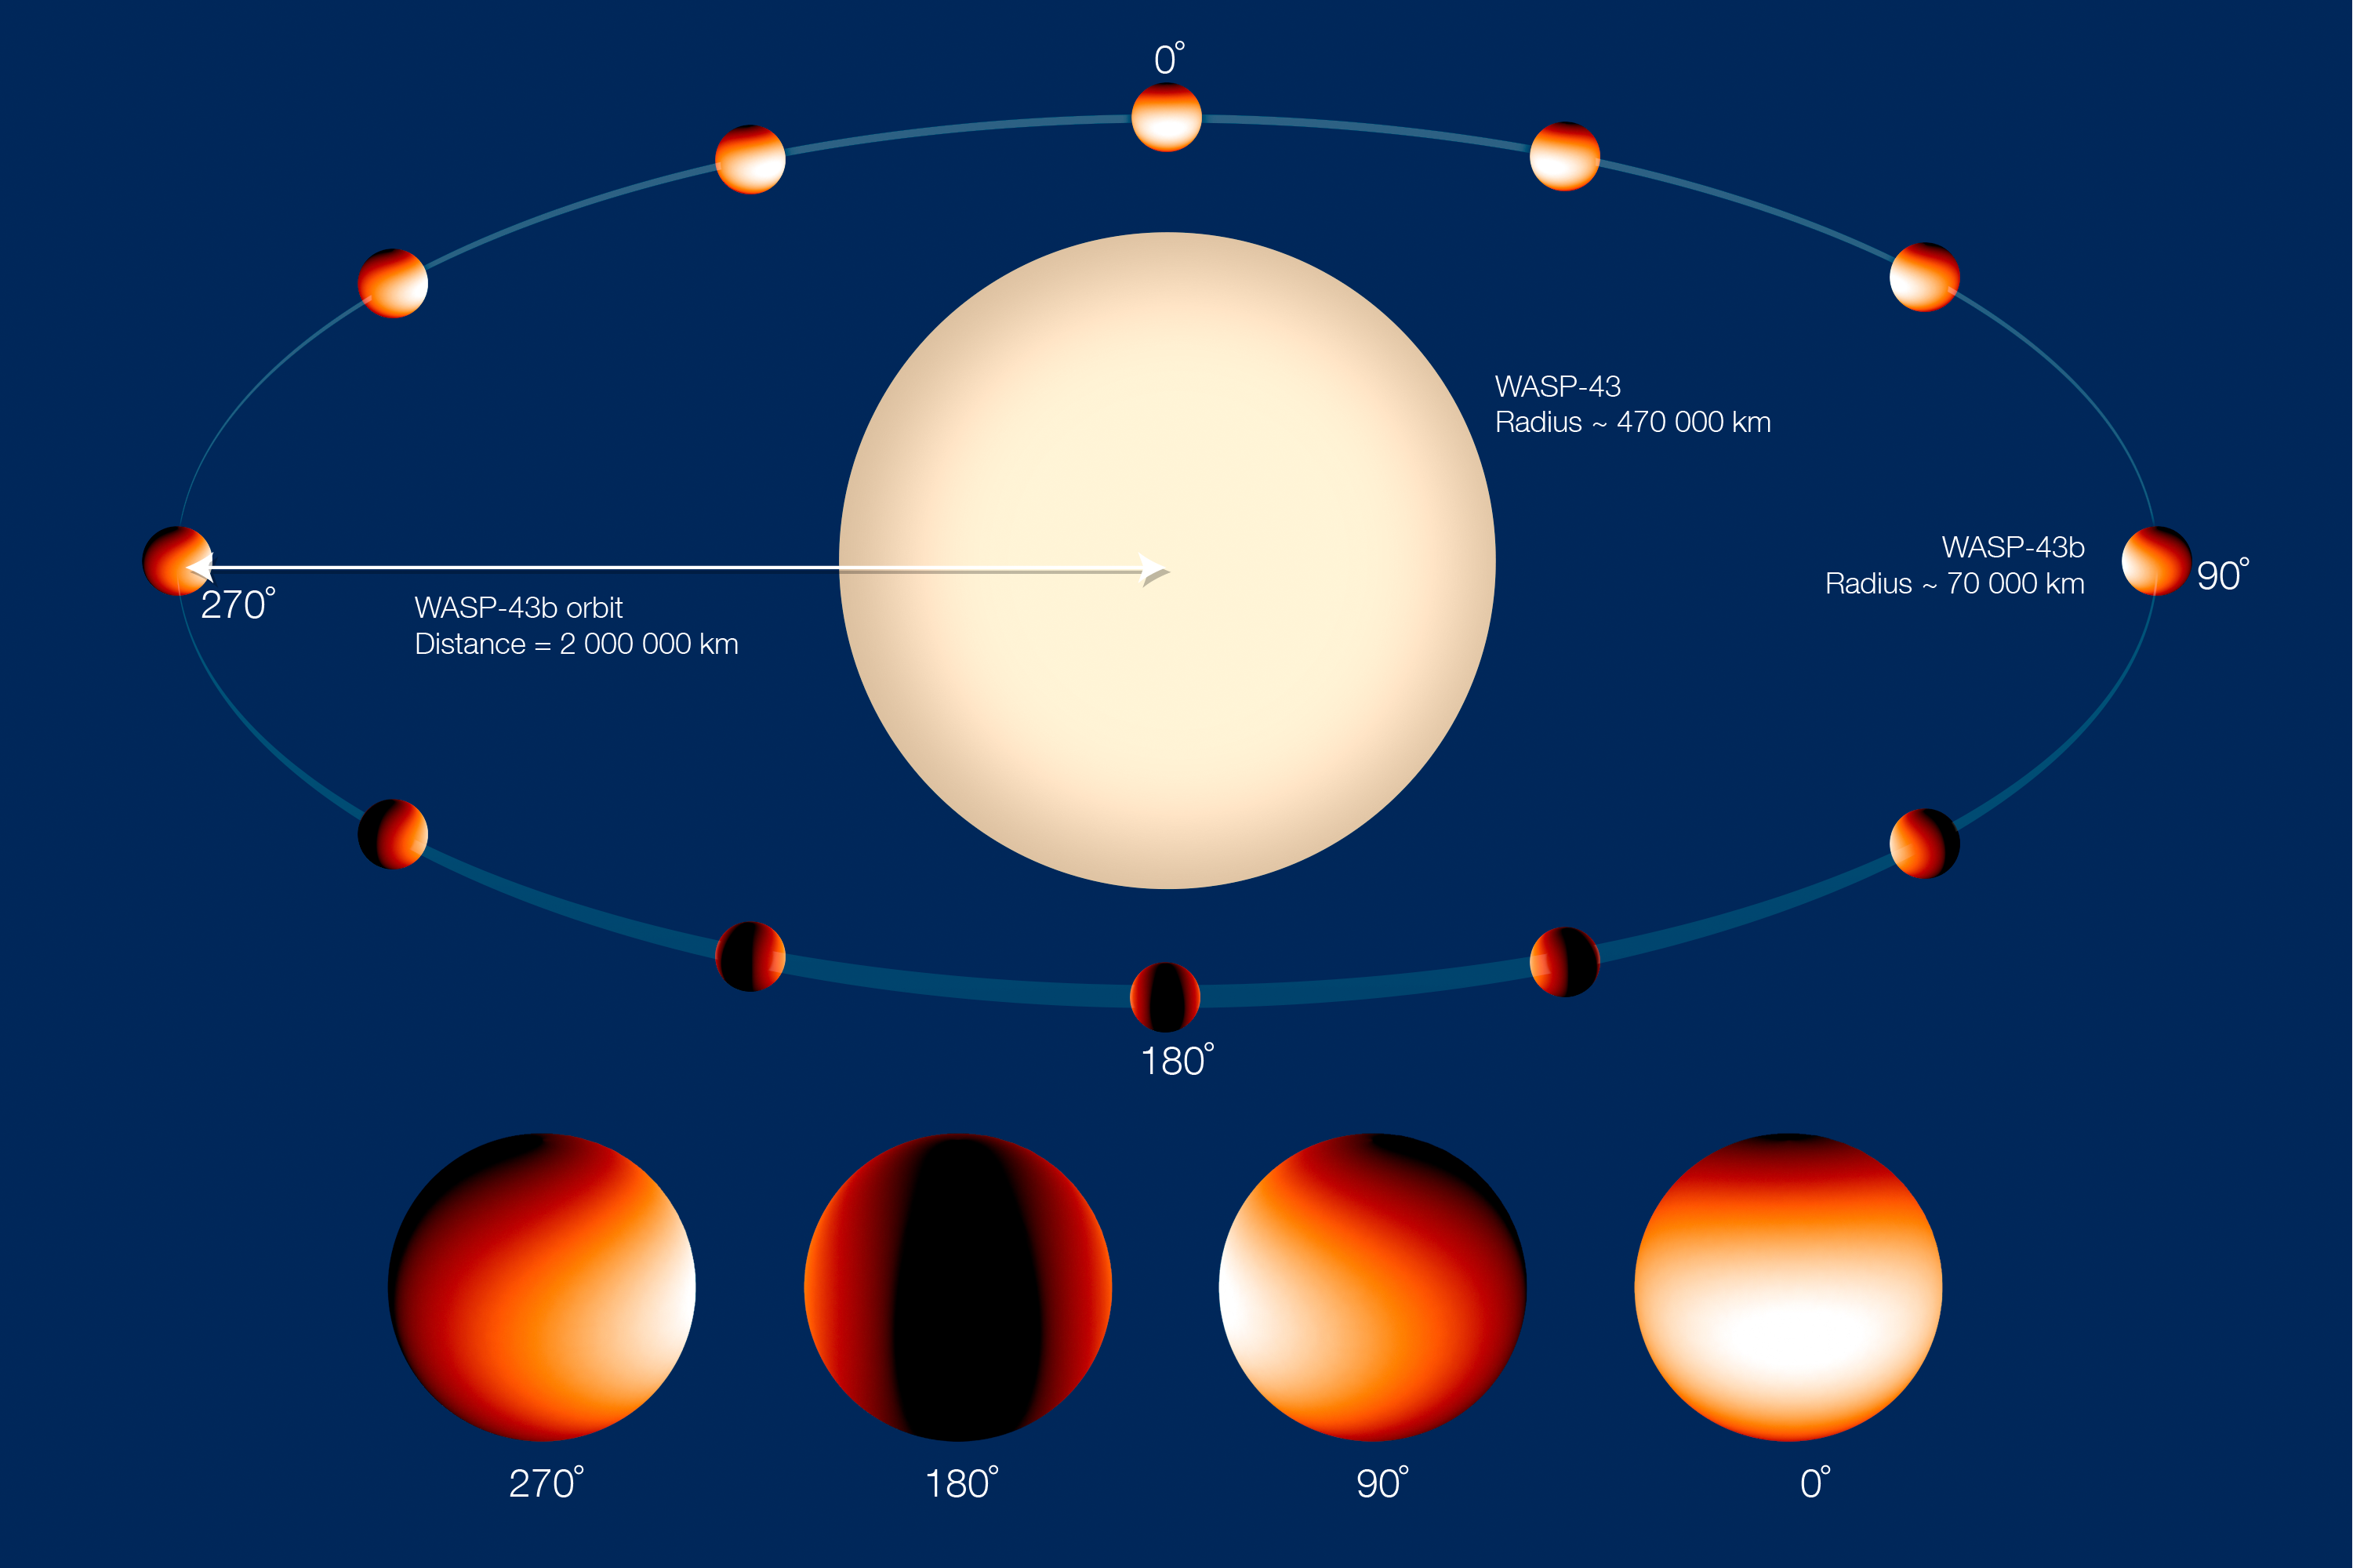

Exoplanet WASP-43b orbits its parent star — Annotated

In this artist’s illustration the Jupiter-sized planet WASP-43b orbits its parent star in one of the closest orbits ever measured for an exoplanet of its size — with a year lasting just 19 hours.

The planet is tidally locked, meaning it keeps one hemisphere facing the star, just as the Moon keeps one face toward Earth.

The colour scale on the planet represents the temperature across its atmosphere. This is based on data from a recent study that mapped the temperature of WASP-43b in more detail than has been done for any other exoplanet.

Credit: NASA, ESA, and Z. Levay (STScI)